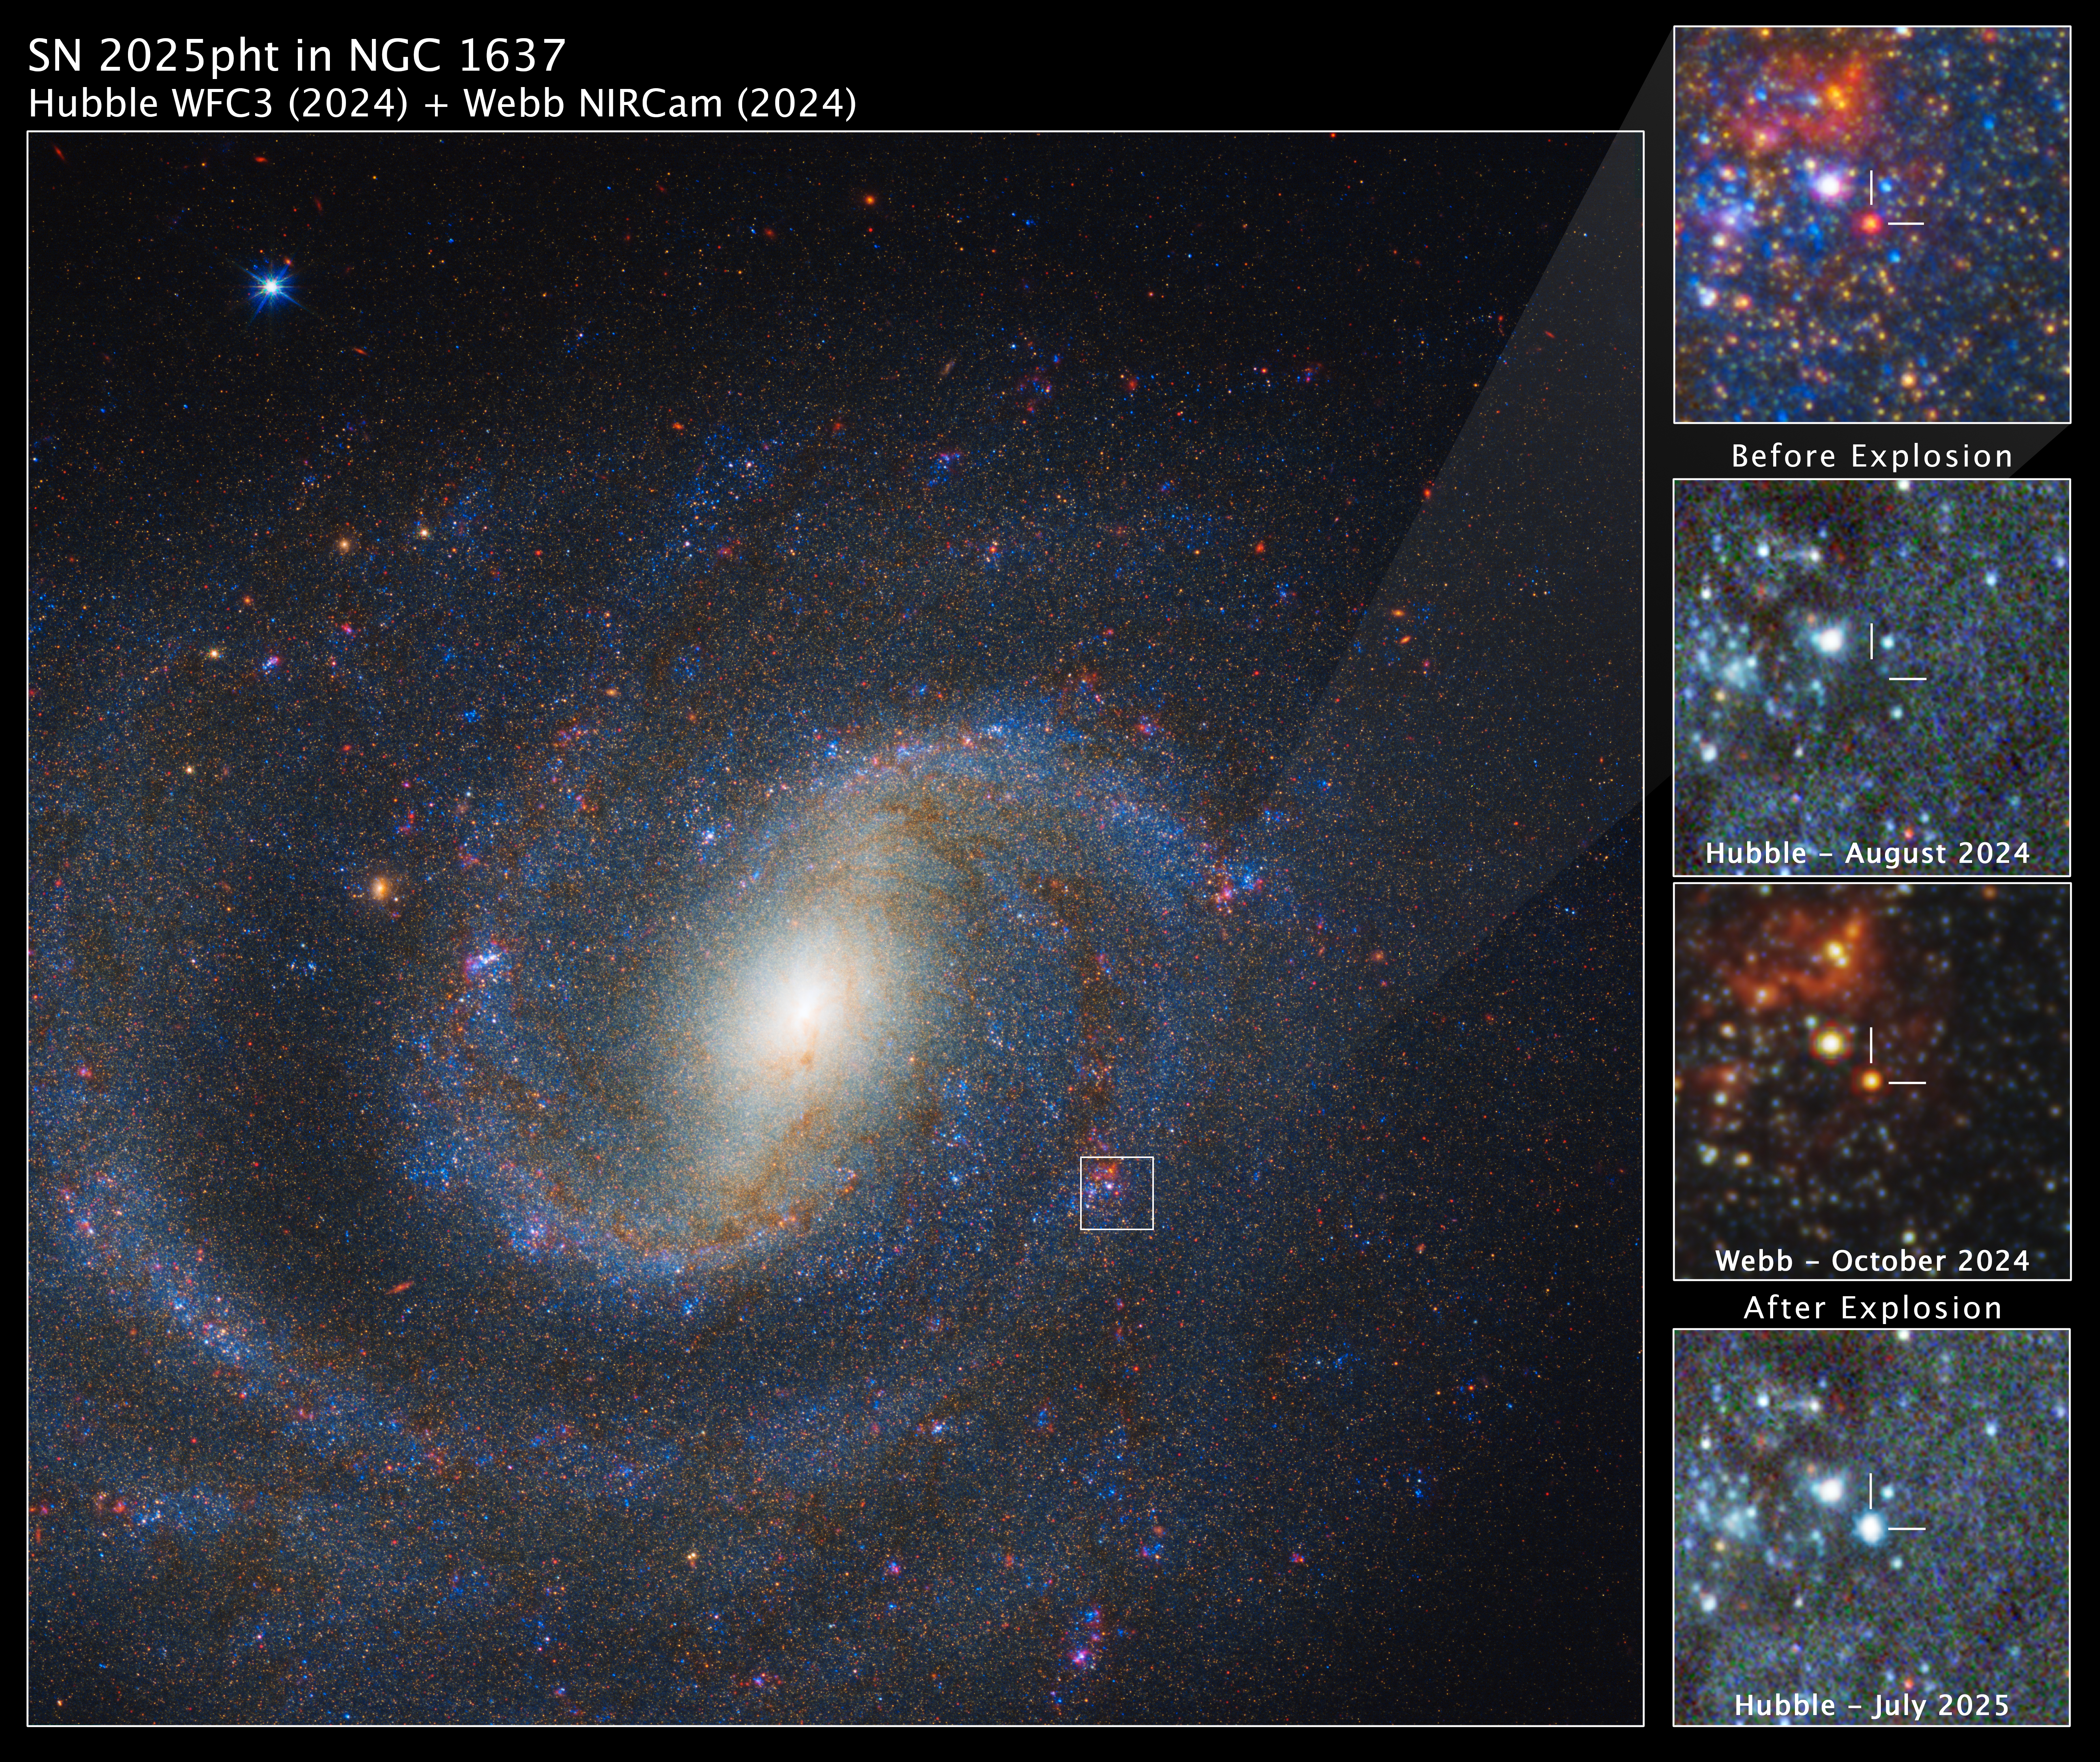

NGC 1637 (Hubble WFC3 and Webb NIRCam images)

The main image at left shows a combined Webb and Hubble view of spiral galaxy NGC 1637, with the region of interest in the top right. The remaining three panels show a detailed view of a red supergiant star before and after it exploded. The star is not visible in the Hubble image before the explosion, but appears in the Webb image. The July 2025 view from Hubble shows the glowing aftermath of the explosion.

Credit: NASA, ESA, CSA, STScI, C. Kilpatrick (Northwestern), A. Suresh (Northwestern); Image Processing: J. DePasquale (STScI)